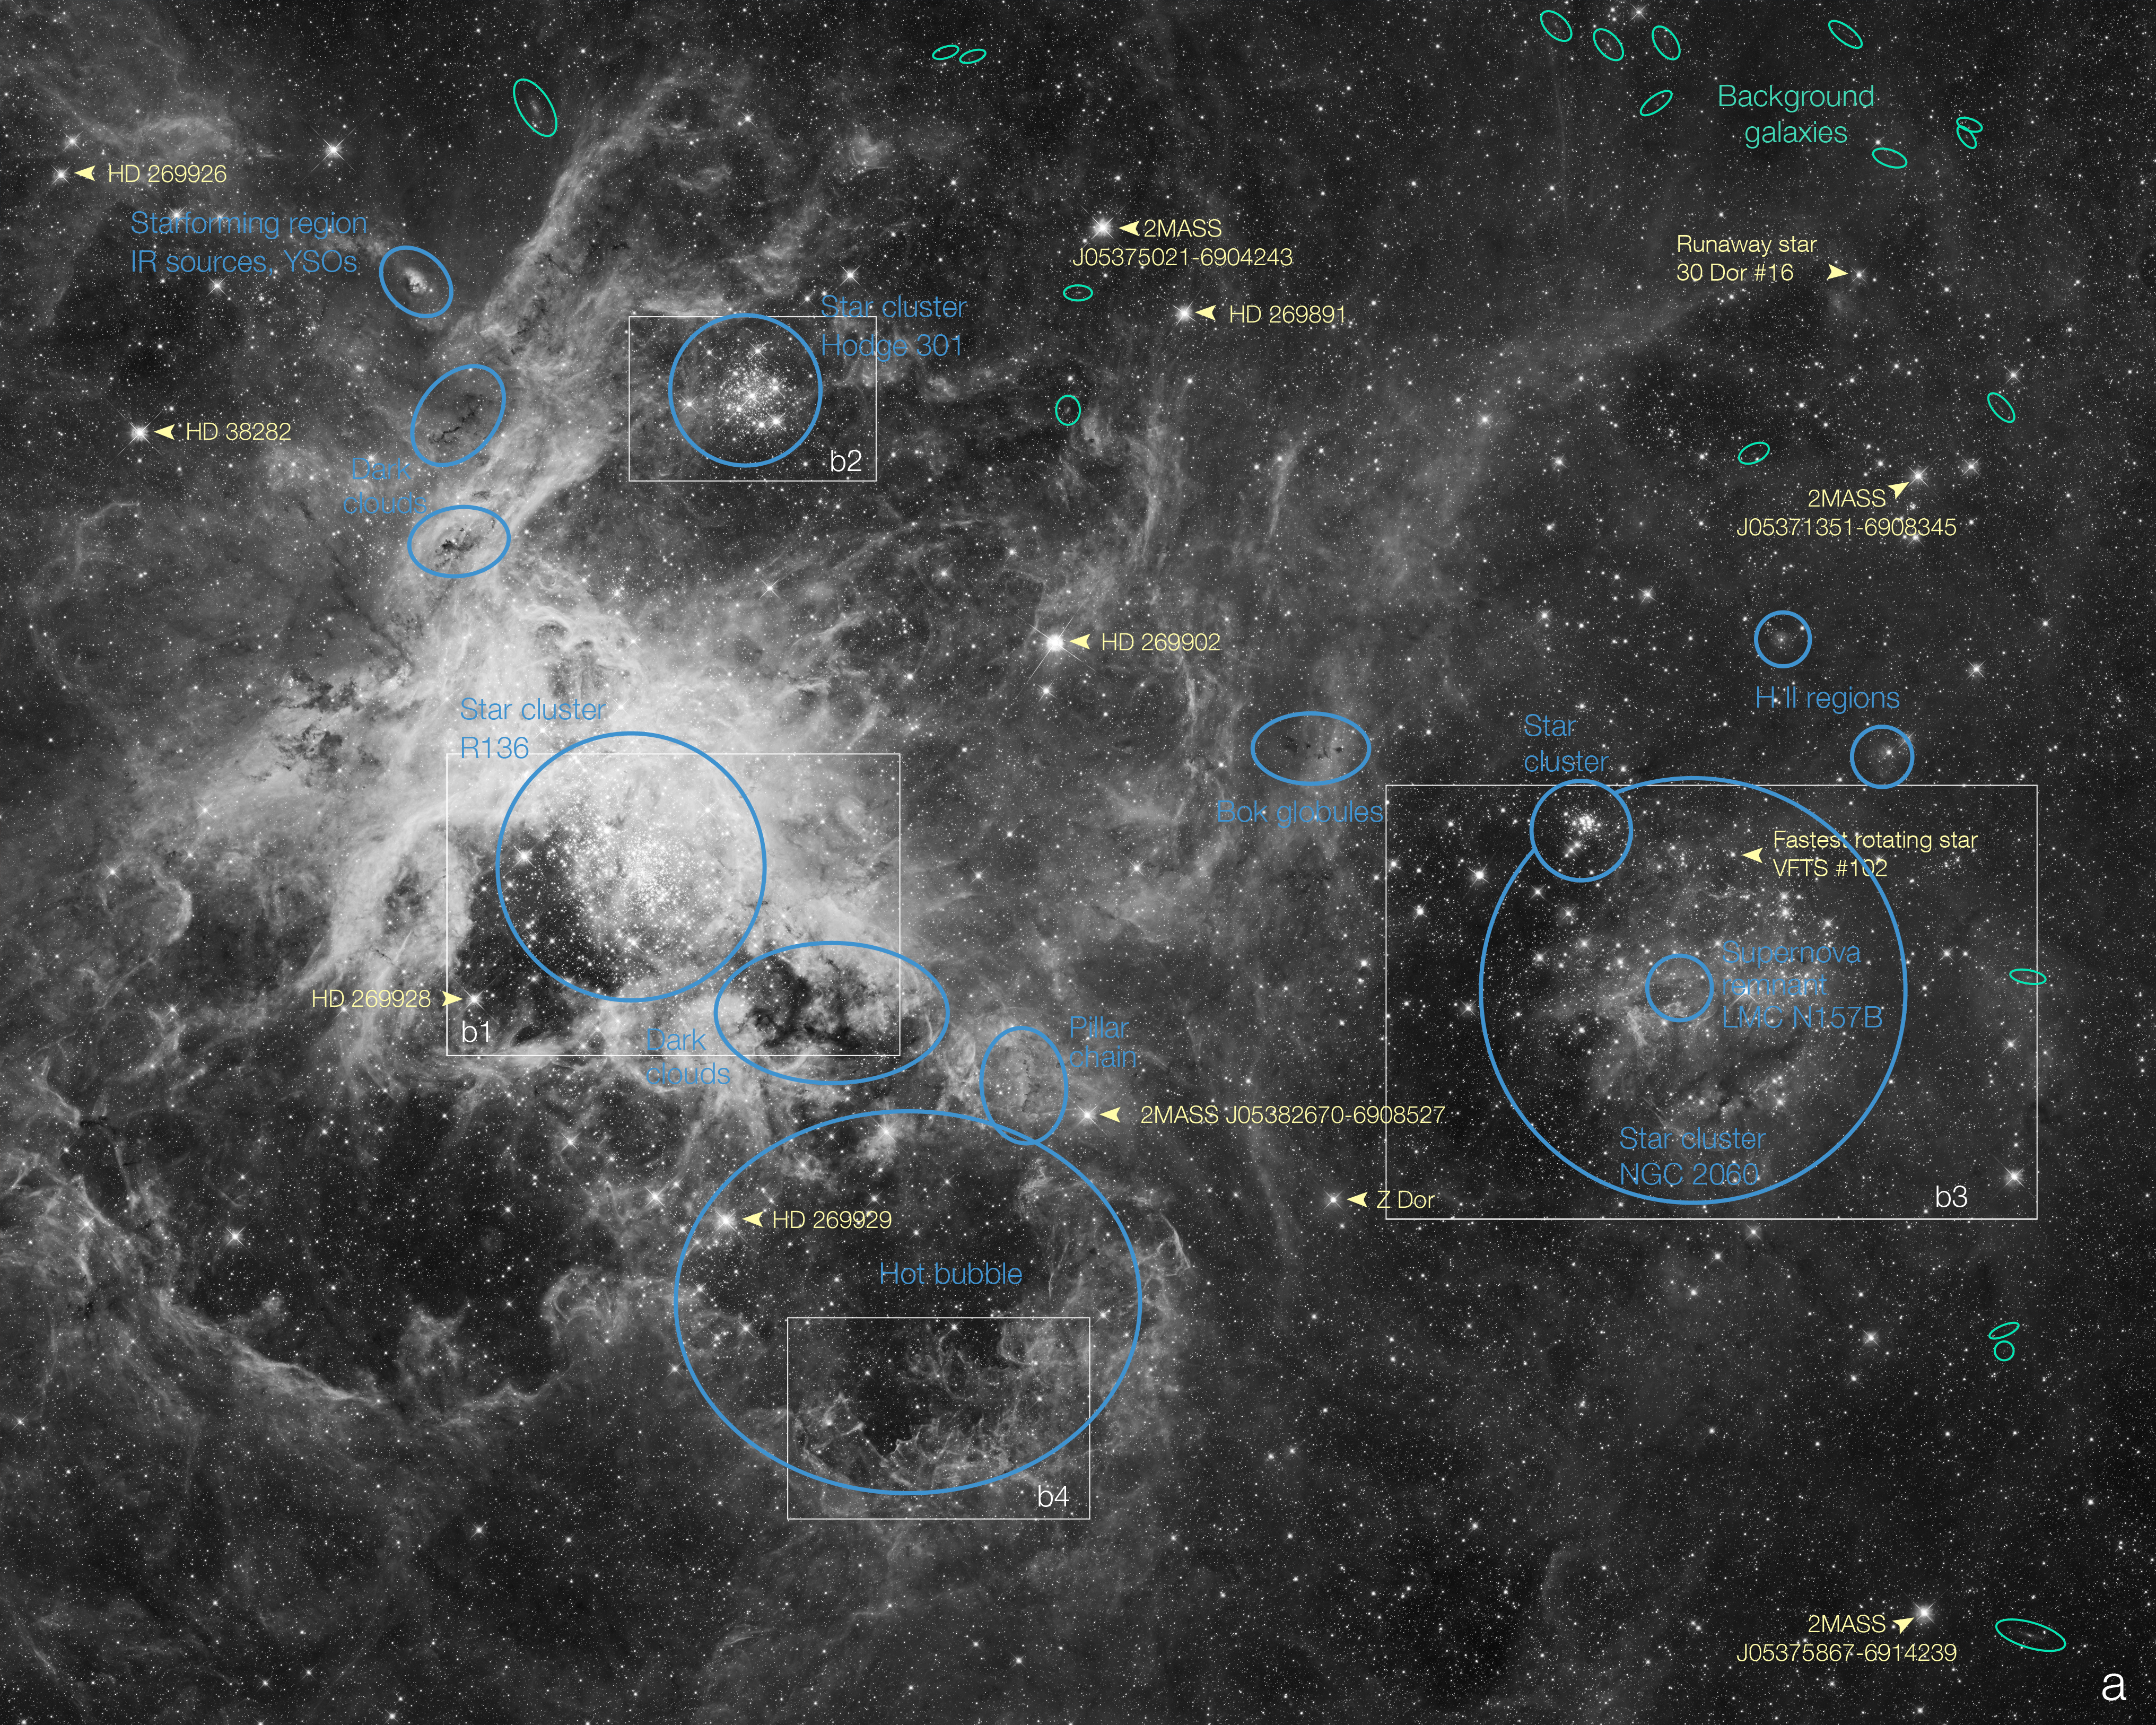

Labelled view of the Tarantula Nebula

This annotated map identifies several prominent features in an image of the Tarantula Nebula (also known as 30 Doradus), a prominent region of star formation located in the Large Magellanic Cloud (LMC) the nearest neighboring galaxy to the Milky Way. The image was produced from numerous exposures by the Hubble Space Telescope’s Wide Field Camera 3 and Advanced Camera for Surveys through a filter which isolates red and near-infrared light.

Individual stars
Some prominent stars are labeled in yellow. Some of these are identified in the Henry Draper Catalog (HD). The stars labeled 2MASS appear in the catalog of objects identified by the 2-Micron All Sky Survey, relatively brighter in infrared light and faint enough in visible light not to appear in catalogues such as HD based on visual observations.

Particularly significant stars identified are: 30 Dor #16, a “runaway” star ejected from the prominent star cluster 30 Doradus, and VFTS #102, the star with the fastest known rotation rate.

Background galaxies
Several background galaxies are visible in the image, labeled in green, though they appear very small because they are much more distant than the Large Magellanic Cloud. A large amount of gas and dust is associated with the LMC and the Tarantula nebula in particular, obscuring most of the light from more distant sources. Near the edges of the nebula, some galaxies are visible, where the obscuration is not enough to completely block the more distant objects.

These galaxies can provide an absolute reference for measuring the positions and motions of the stars within the Tarantula and the LMC. The motion of these objects is extremely difficult to measure precisely because of the vast distance to the LMC. However with the fine resolution of Hubble’s cameras it is possible to measure the motions in images taken some time apart. The background galaxies are immensely farther away, so their positions within the field of view is essentially fixed, providing a frame of reference against which the positions and motions of the closer objects in the Tarantula and LMC can be compared.

Star clusters
Numerous star clusters are scattered in the Tarantula Nebula region, labeled in blue. They formed at different times from giant clouds of gas and dust. Characteristics of the clusters as a whole and their constituent stars enable astronomers to determine their relative ages. The most massive, hottest stars emit copious high-energy radiation, pushing away, compressing and sculpting the remaining gas and dust, triggering another generation of star formation.

Dark clouds
Dense, cooler, dusty clouds obscure the light from more distant stars appearing dark against stars and glowing gas behind them, here labeled in blue. The smallest, densest dark clouds are known as Bok globules, in which new stars are likely forming.

The rectangles labelled b1, b2, b3, b4 correspond to the four close-ups in image heic1206b.

Credit: NASA, ESA, D. Lennon and E. Sabbi (ESA/STScI), J. Anderson, S. E. de Mink, R. van der Marel, T. Sohn, and N. Walborn (STScI), N. Bastian (Excellence Cluster, Munich), L. Bedin (INAF, Padua), E. Bressert (ESO), P. Crowther (Sheffield), A. de Koter (Amsterdam), C. Evans (UKATC/STFC, Edinburgh), A. Herrero (IAC, Tenerife), N. Langer (AifA, Bonn), I. Platais (JHU) and H. Sana (Amsterdam)